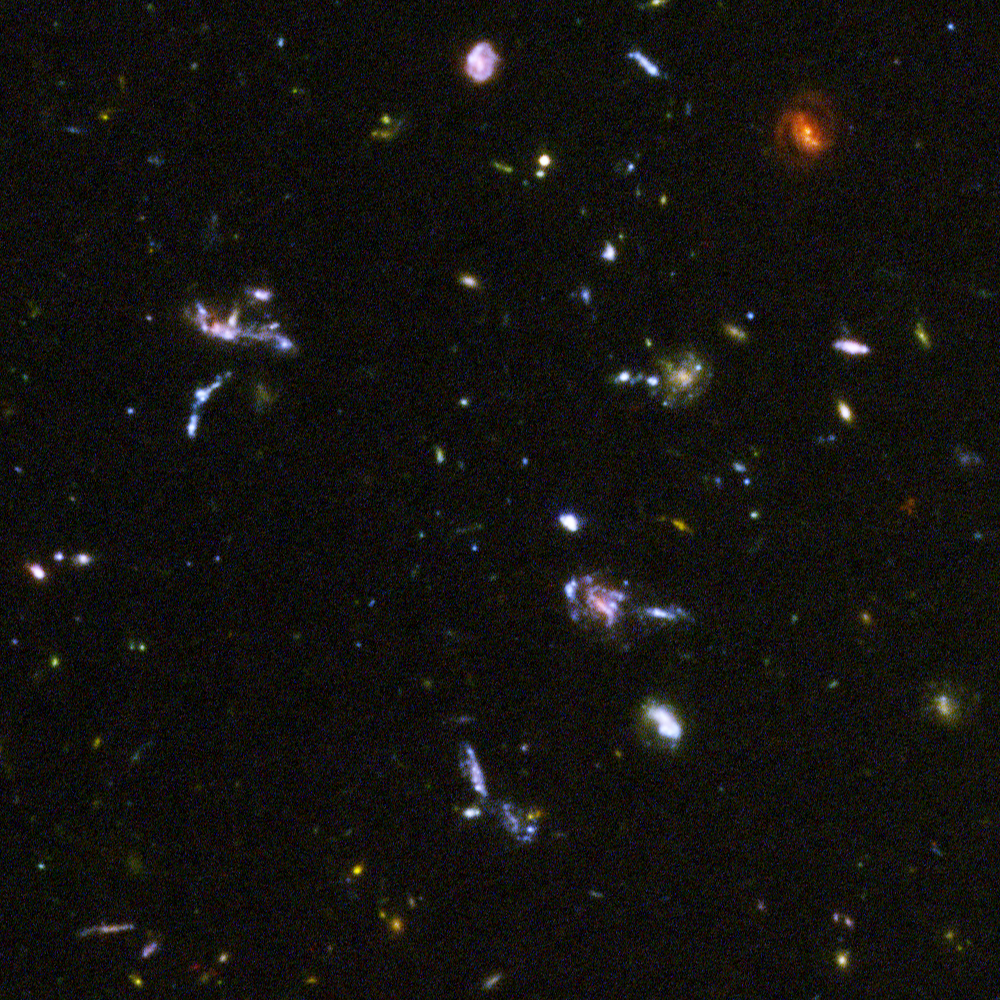

Hubble reveals galactic drama [image 6]

A galactic brawl. A close encounter with a spiral galaxy. Blue wisps of galaxies. These close-up snapshots of galaxies in the Hubble Ultra Deep Field reveal the drama of galactic life.

The galaxies in this panel were plucked from a harvest of nearly 10,000 galaxies in the Ultra Deep Field, the deepest visible-light image of the cosmos.

The Ultra Deep Field observations, taken by the Advanced Camera for Surveys, represent a narrow, "deep" view of the cosmos. Peering into the Ultra Deep Field is like looking through a 2.5 metre-long soda straw.

In ground-based images, the patch of sky in which the galaxies reside (just one-tenth the diameter of the full Moon) is largely empty. Located in the constellation Fornax, the region is so empty, in fact, that only a handful of stars within the Milky Way galaxy can be seen in the image.

In this image, blue and green correspond to colours that can be seen by the human eye, such as hot, young, blue stars and the glow of Sun-like stars in the disks of galaxies. Red represents near-infrared light, which is invisible to the human eye, such as the red glow of dust-enshrouded galaxies.

The image required 800 exposures taken over the course of 400 Hubble orbits around Earth. The total amount of exposure time was 11.3 days, taken between Sept. 24, 2003 and Jan. 16, 2004.

Credit: NASA, ESA, and S. Beckwith (STScI) and the HUDF Team